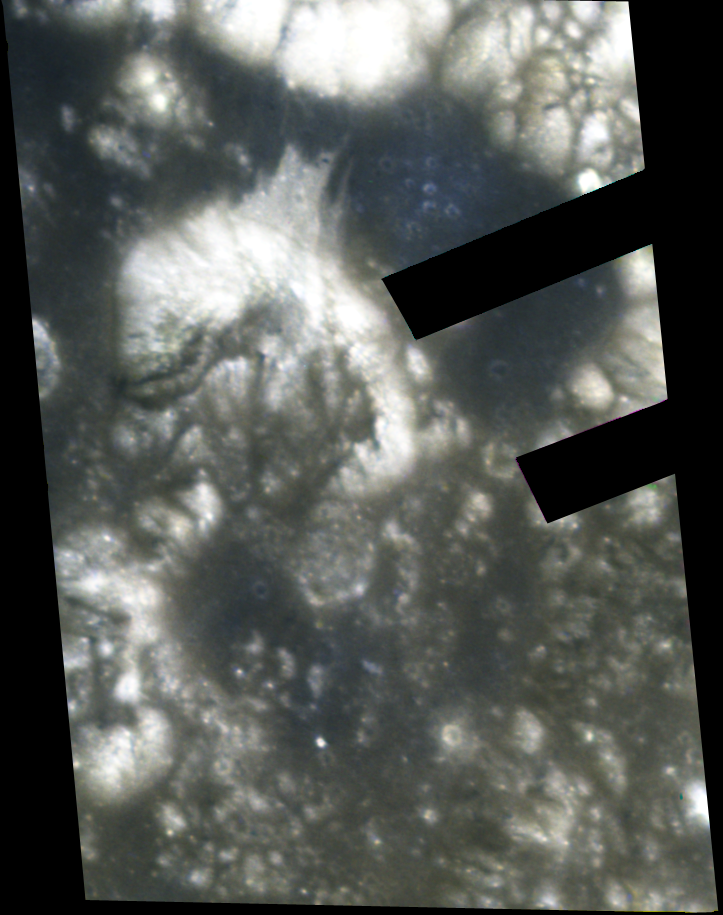

Hubble's View of the Apollo 17 Landing Site

This image of the Taurus-Littrow valley shows the Apollo 17 landing site (the "+" symbol in the image). This region marks the last time - December 1972 - that humans walked and drove on the Moon's surface. Astronomers are using the Apollo 17 images (and those of the Apollo 15 site) as "ground-truth" in an effort to discriminate lunar materials enriched in ilmenite, a titanium-bearing oxide of potential value as a resource in human exploration of the Moon. Hubble's Advanced Camera for Surveys took the image on Aug. 16, 2005.

Credit: NASA, ESA, and J. Garvin (NASA/GSFC)